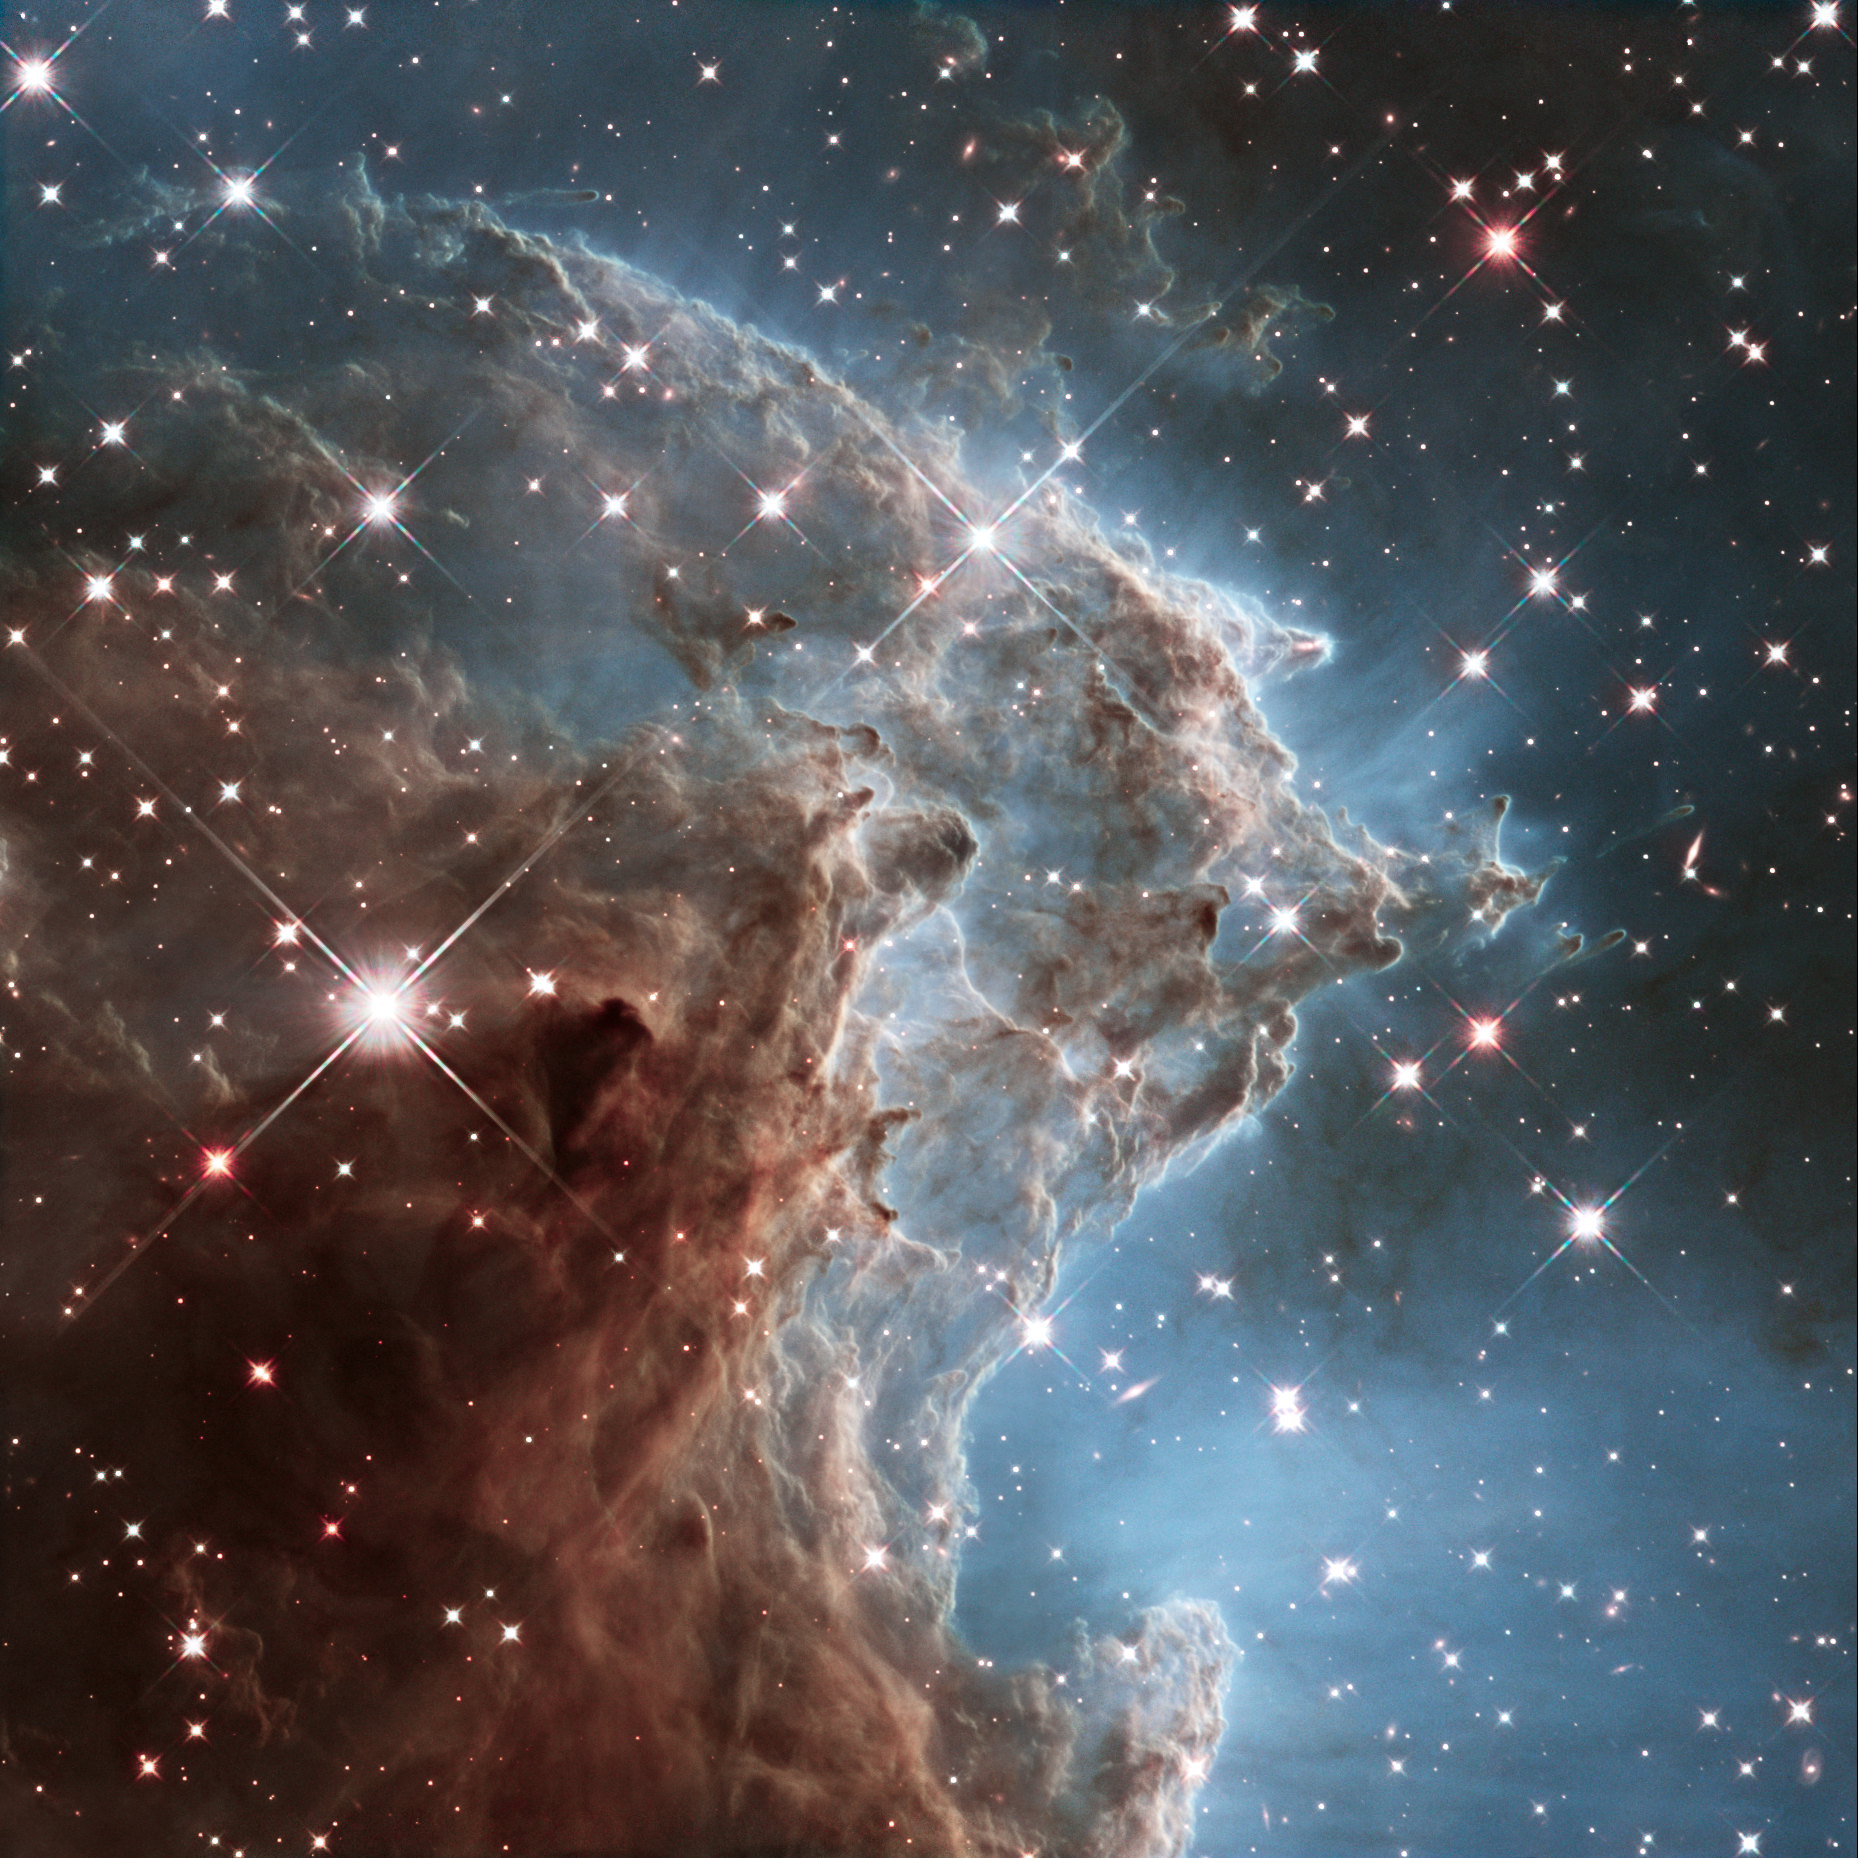

New Hubble image of NGC 2174

To celebrate its 24th year in orbit, the NASA/ESA Hubble Space Telescope has released this beautiful new image of part of NGC 2174, also known as the Monkey Head Nebula.

NGC 2174 lies about 6400 light-years away in the constellation of Orion (The Hunter). Hubble previously viewed this part of the sky back in 2011 — the colourful region is filled with young stars embedded within bright wisps of cosmic gas and dust.

This portion of the Monkey Head Nebula was imaged in the infrared using Hubble's Wide Field Camera 3.

Credit: NASA, ESA, and the Hubble Heritage Team (STScI/AURA)